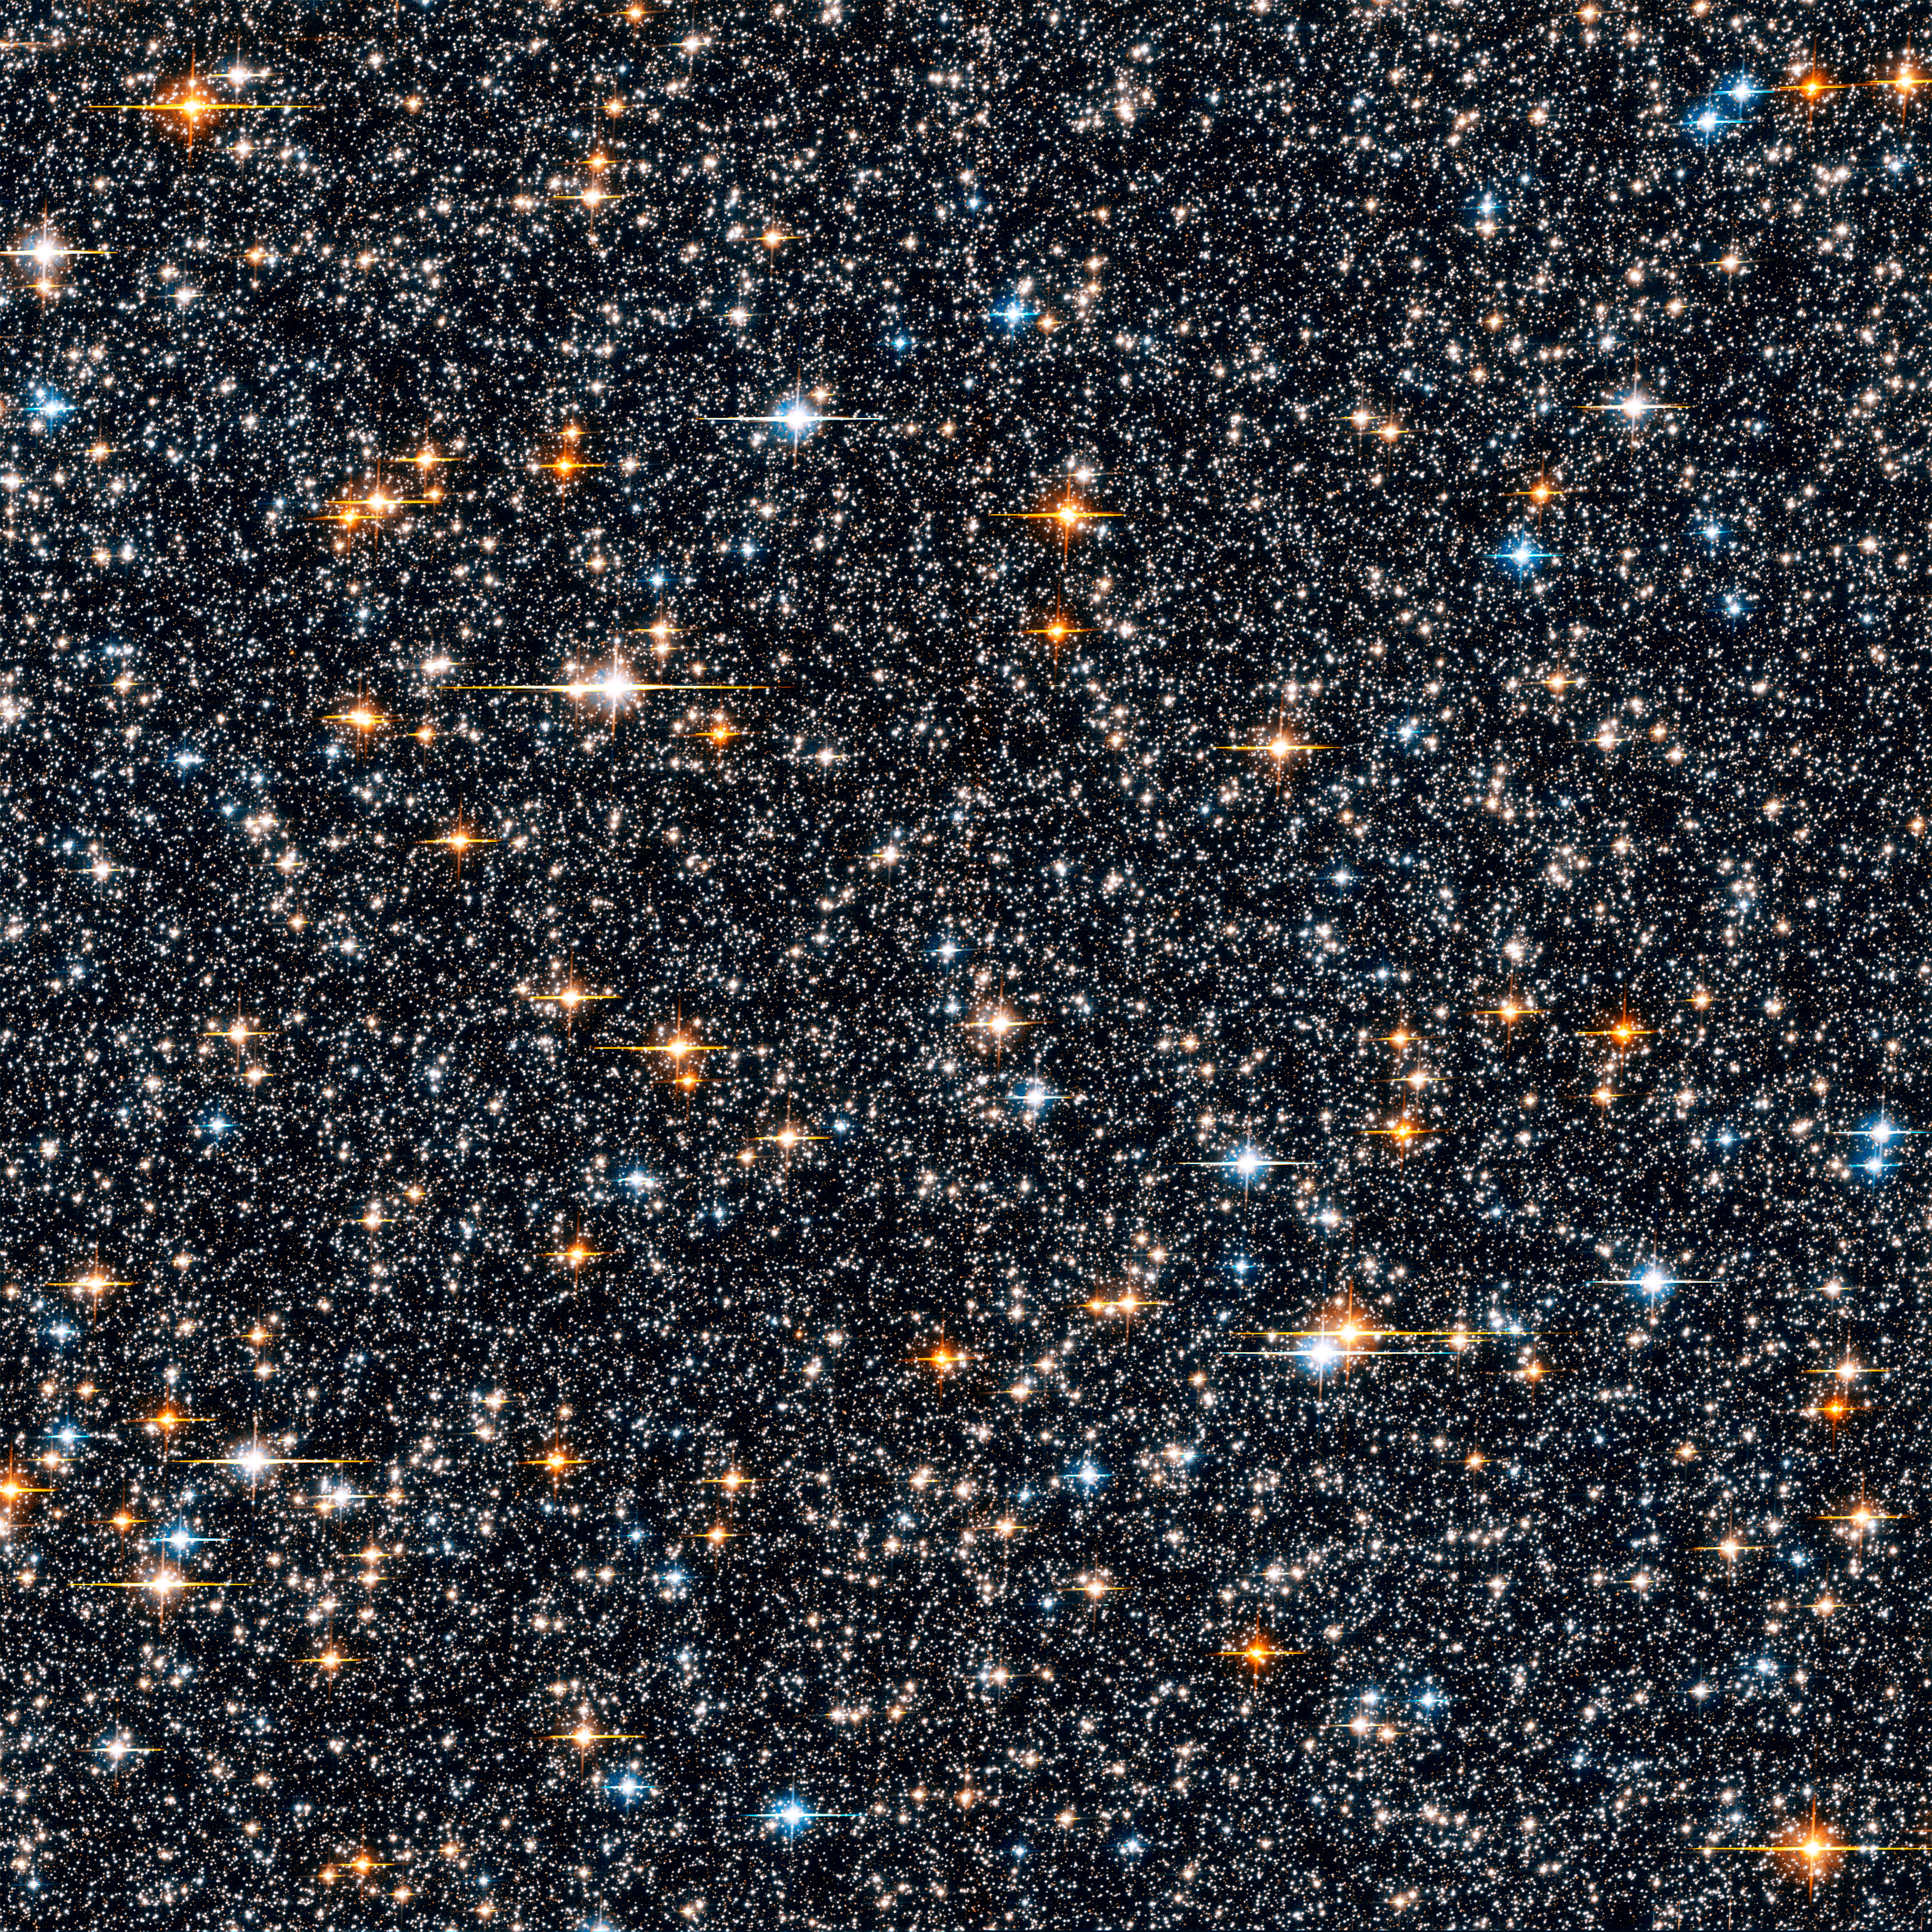

Hubble ACS SWEEPS field

Hubble ACS SWEEPS field.

Credit: NASA, ESA, W. Clarkson (Indiana University and UCLA) and K. Sahu (STScI)